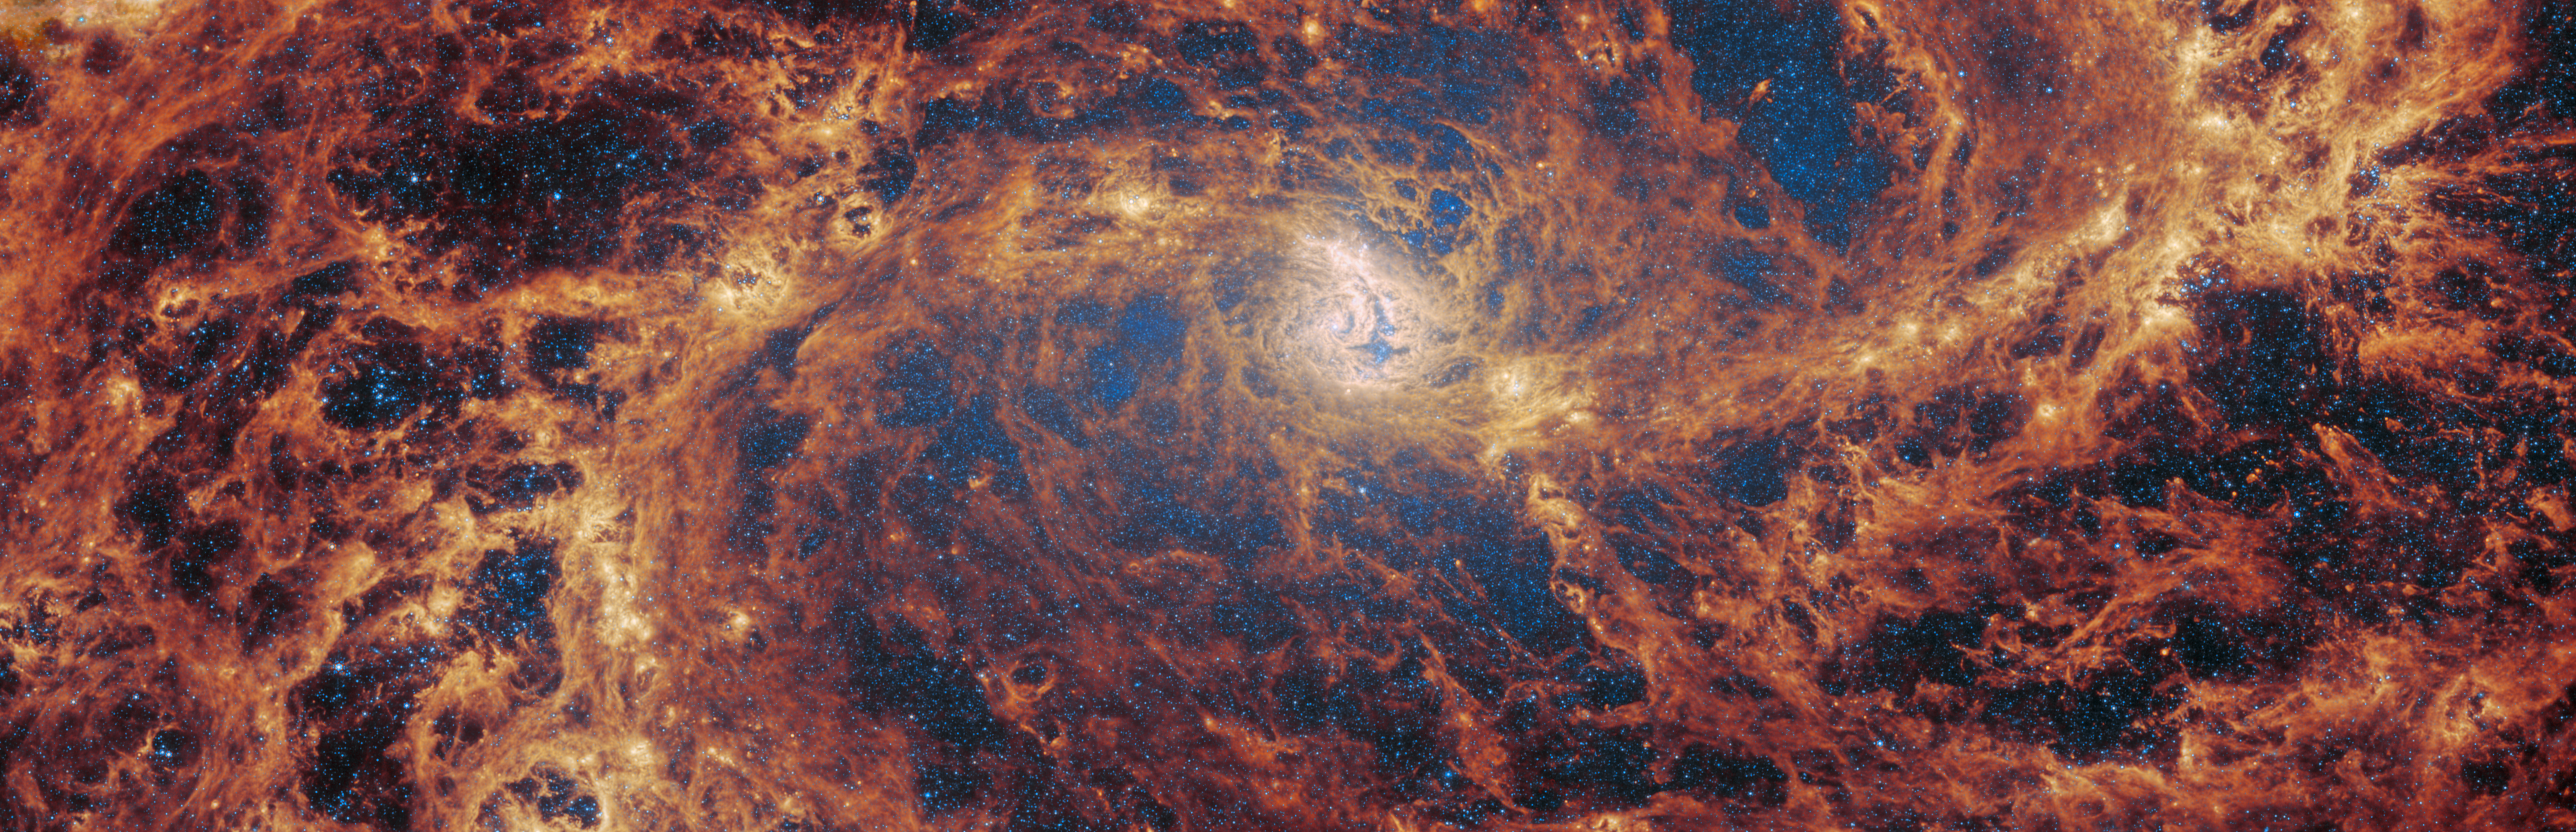

M83 (MIRI image, scaled)

The spiral galaxy M83, which is also known as NGC 5236, was observed by Webb as part of a series of observations collectively titled Feedback in Emerging extrAgalactic Star clusTers, or FEAST. Another target of the FEAST observations, M51, was the subject of a previous Webb Picture of the Month. As with all six galaxies that comprise the FEAST sample, M83 and M51 were observed with both NIRCam and MIRI, two of the four instruments that are mounted on Webb.

MIRI, or the Mid-InfraRed Instrument, makes observations in the mid-infrared, which spans wavelengths of light very different from optical wavelengths. Optical wavelengths in astronomy roughly correspond to the range of light waves that human eyes are sensitive to, and extend from about 0.38 to 0.75 micrometres (a micrometre, or micron, is one thousandth of a millimetre). By contrast, MIRI detects light from 5 to 28 micrometres — however, when it makes observations, it does not typically observe across this entire wavelength range all at once. Instead, MIRI has a set of ten filters that allow very specific regions of light through. For example, one of MIRI’s filters (dubbed F770W), allows light with wavelengths of 6.581 to 8.687 micrometres to pass through it.

This image was compiled using data collected through just two of MIRI’s ten filters, near the short end of the instrument’s wavelength range. The result is this extraordinarily detailed image, with its creeping tendrils of gas, dust and stars. In this image, the bright blue shows the distribution of stars across the central part of the galaxy. The bright yellow regions that weave through the spiral arms indicate concentrations of active stellar nurseries, where new stars are forming. The orange-red areas indicate the distribution of a type of carbon-based compound known as polycyclic aromatic hydrocarbons (or PAHs) — the F770W filter, one of the two used here, is particularly suited to imaging these important molecules.

Credit: ESA/Webb, NASA & CSA, A. Adamo (Stockholm University) and the FEAST JWST team